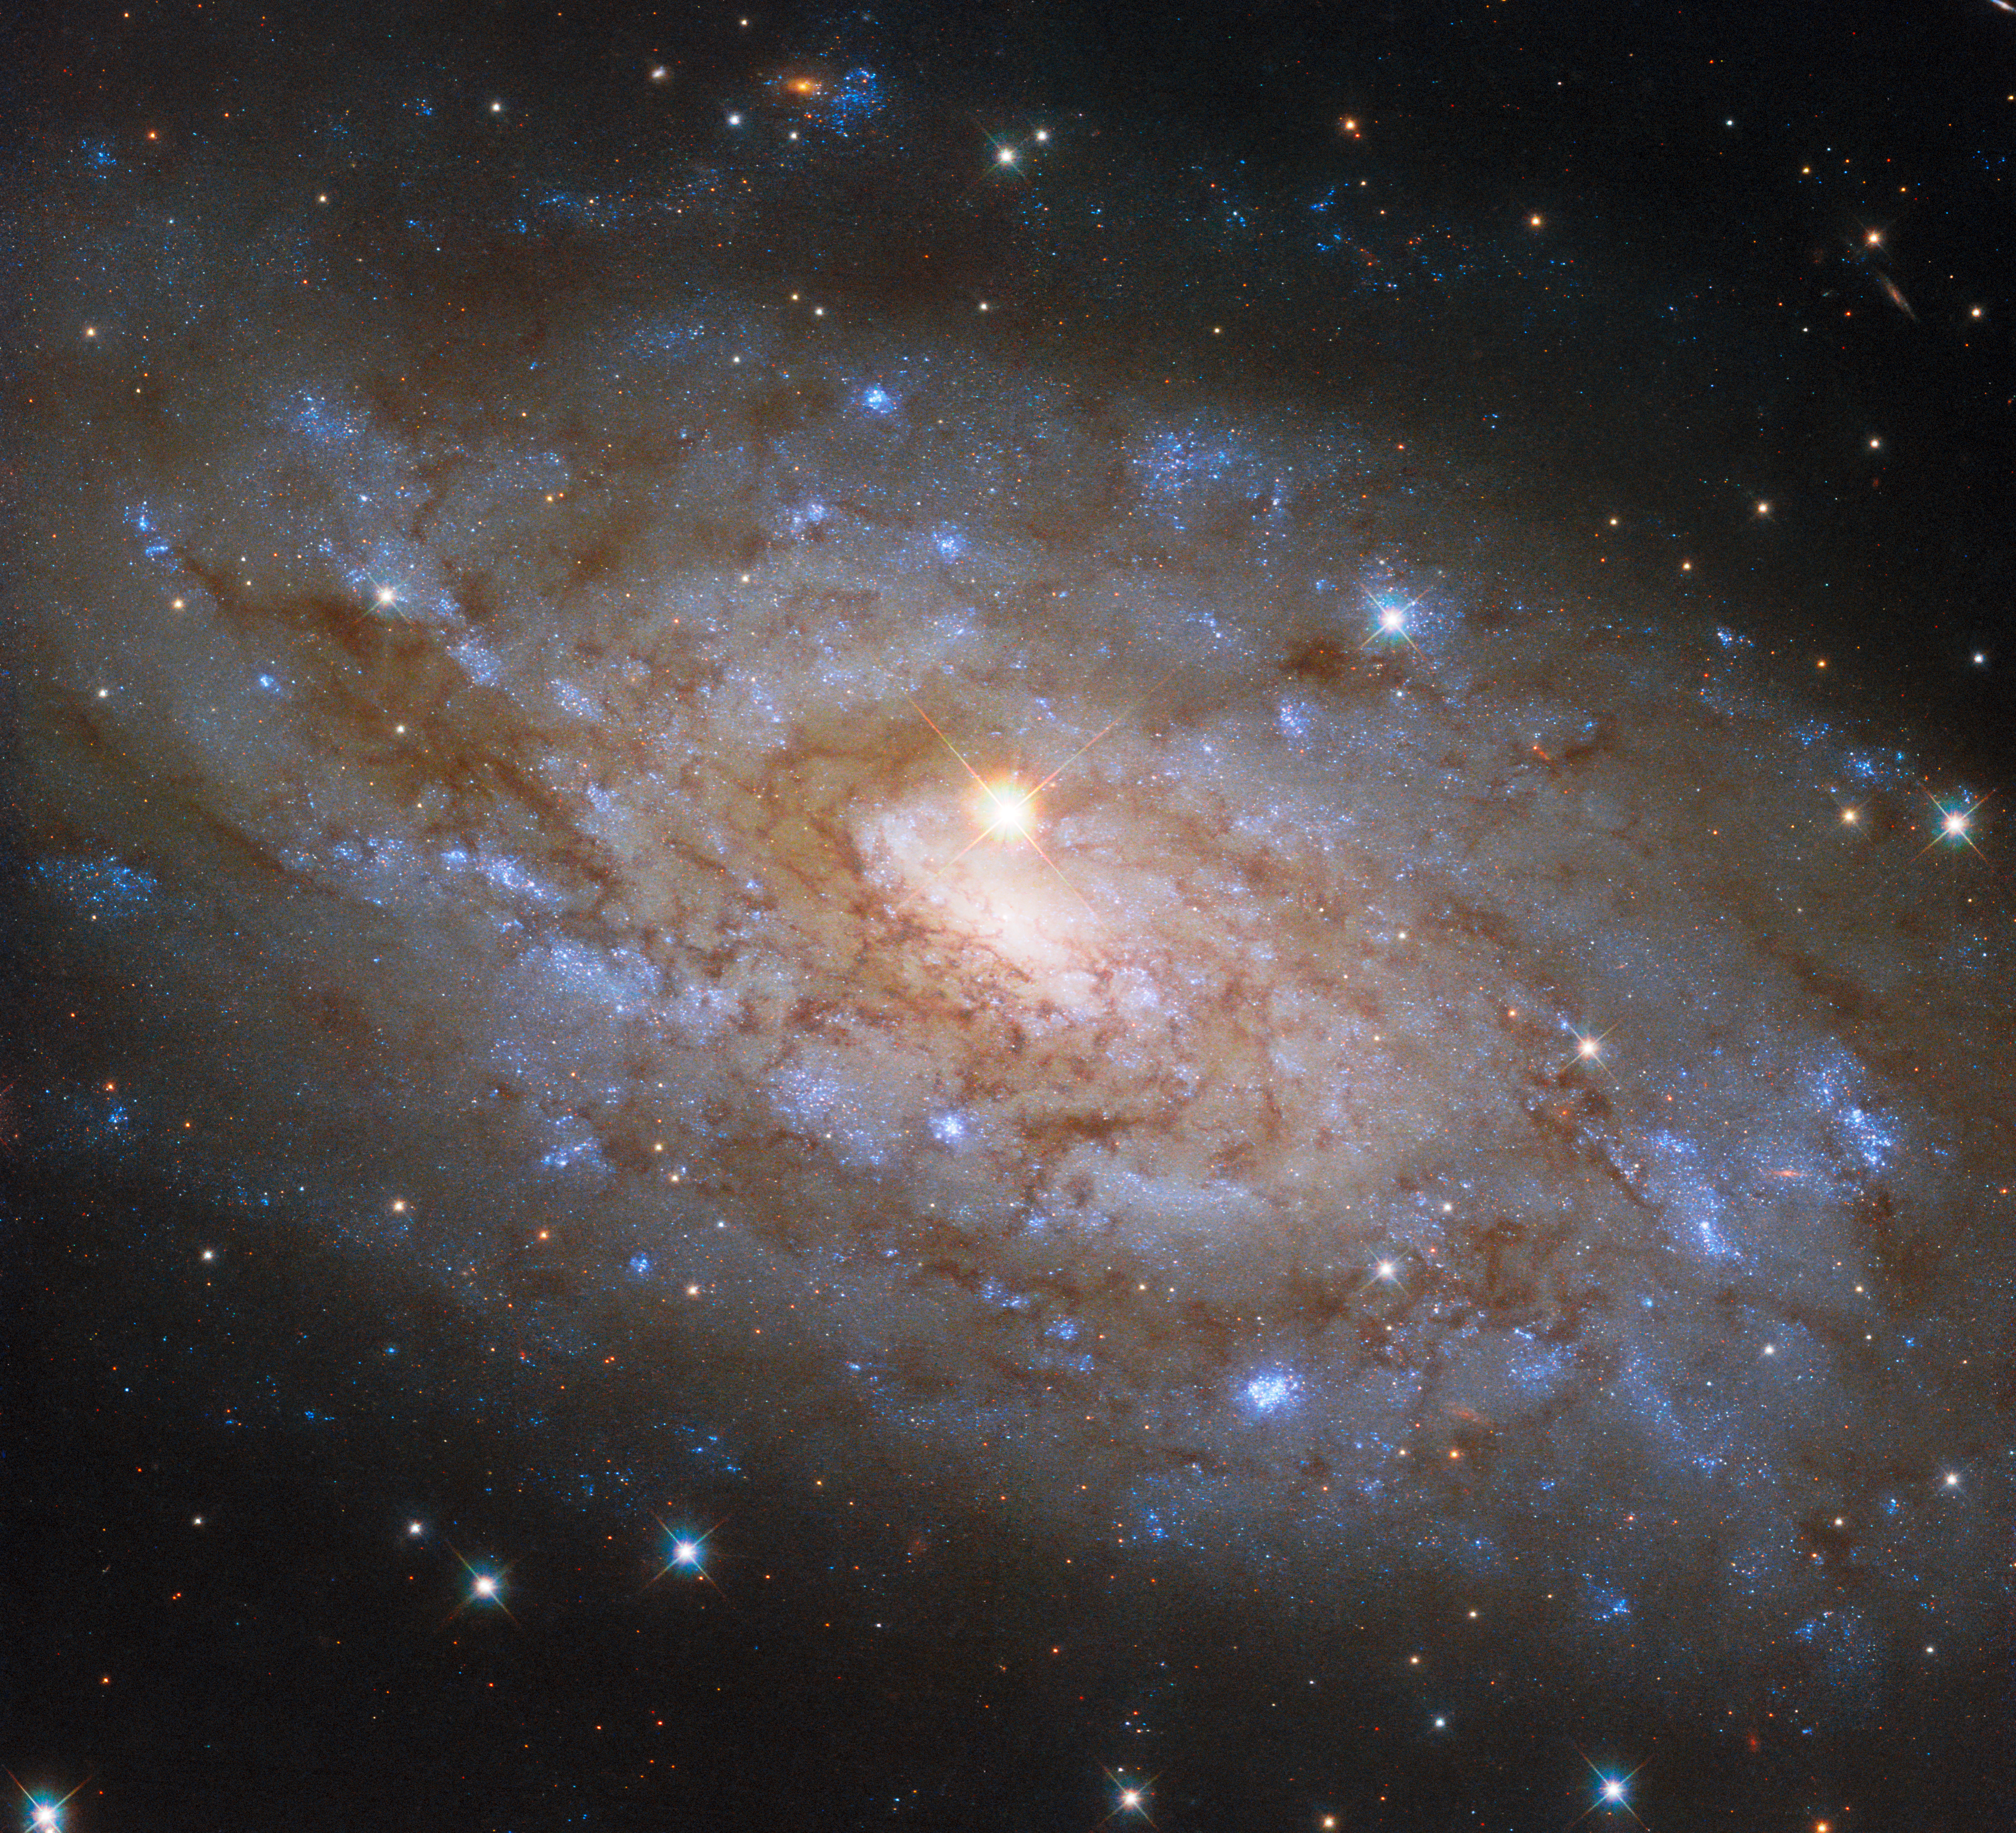

A chance alignment in Lupus

The subject of today’s NASA/ESA Hubble Space Telescope Picture of the Week is the stunning spiral galaxy NGC 5530. NGC 5530 is situated 40 million light-years away in the constellation Lupus (The Wolf). This galaxy is classified as a ‘flocculent’ spiral, meaning that its spiral arms are patchy and indistinct.

While some galaxies have extraordinarily bright centres where they host a feasting supermassive black hole, the bright source near the centre of NGC 5530 is not an active black hole but instead a star within our own galaxy, only 10 thousand light-years from Earth. This chance alignment gives the appearance that the star is at the dense heart of NGC 5530.

If you had pointed a backyard telescope at NGC 5530 on the evening of 13 September 2007, you would have seen another bright point of light adorning the galaxy. That night, Australian amateur astronomer Robert Evans discovered a supernova, named SN 2007IT, by comparing NGC 5530’s appearance through the telescope to a reference photo of the galaxy. While it’s remarkable to discover even one supernova using this painstaking method, Evans has in fact discovered more than 40 supernovae this way! This particular discovery was truly serendipitous: it’s likely that the light from the supernova had completed its 40-million-year journey to Earth just days before the explosion was discovered.

Credit: ESA/Hubble & NASA, D. Thilker